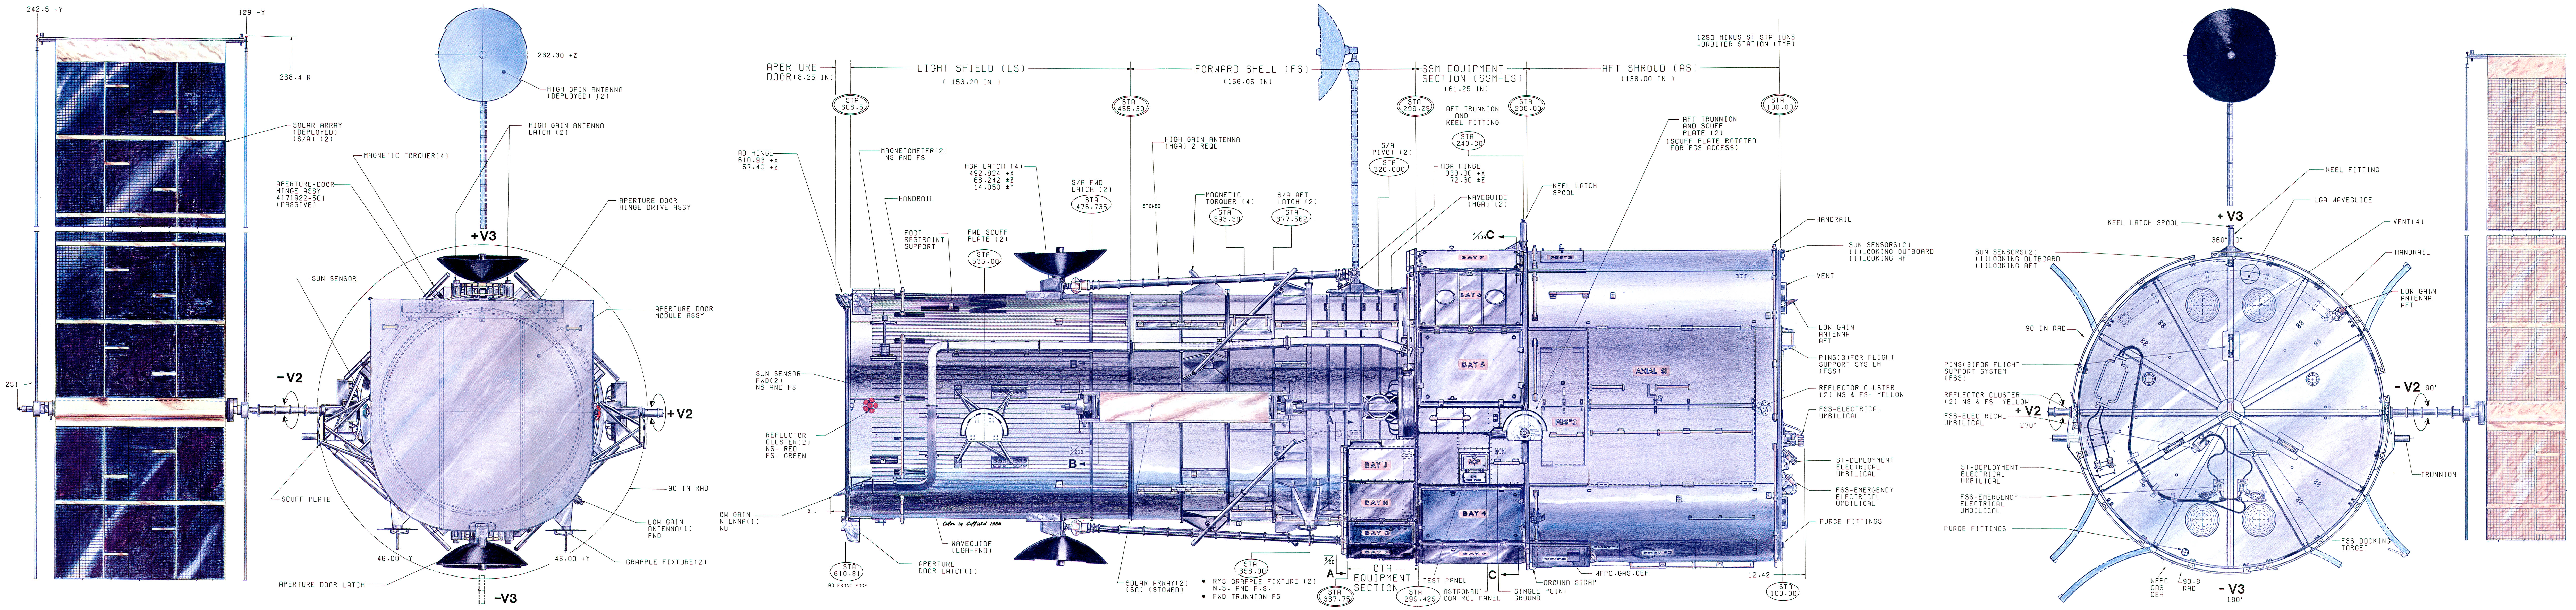

Diagram of the Hubble Space Telescope, 1981

Diagram of the Hubble Space Telescope from 1981.

Credit: Lockheed Missiles and Space Company (Lockheed Martin).